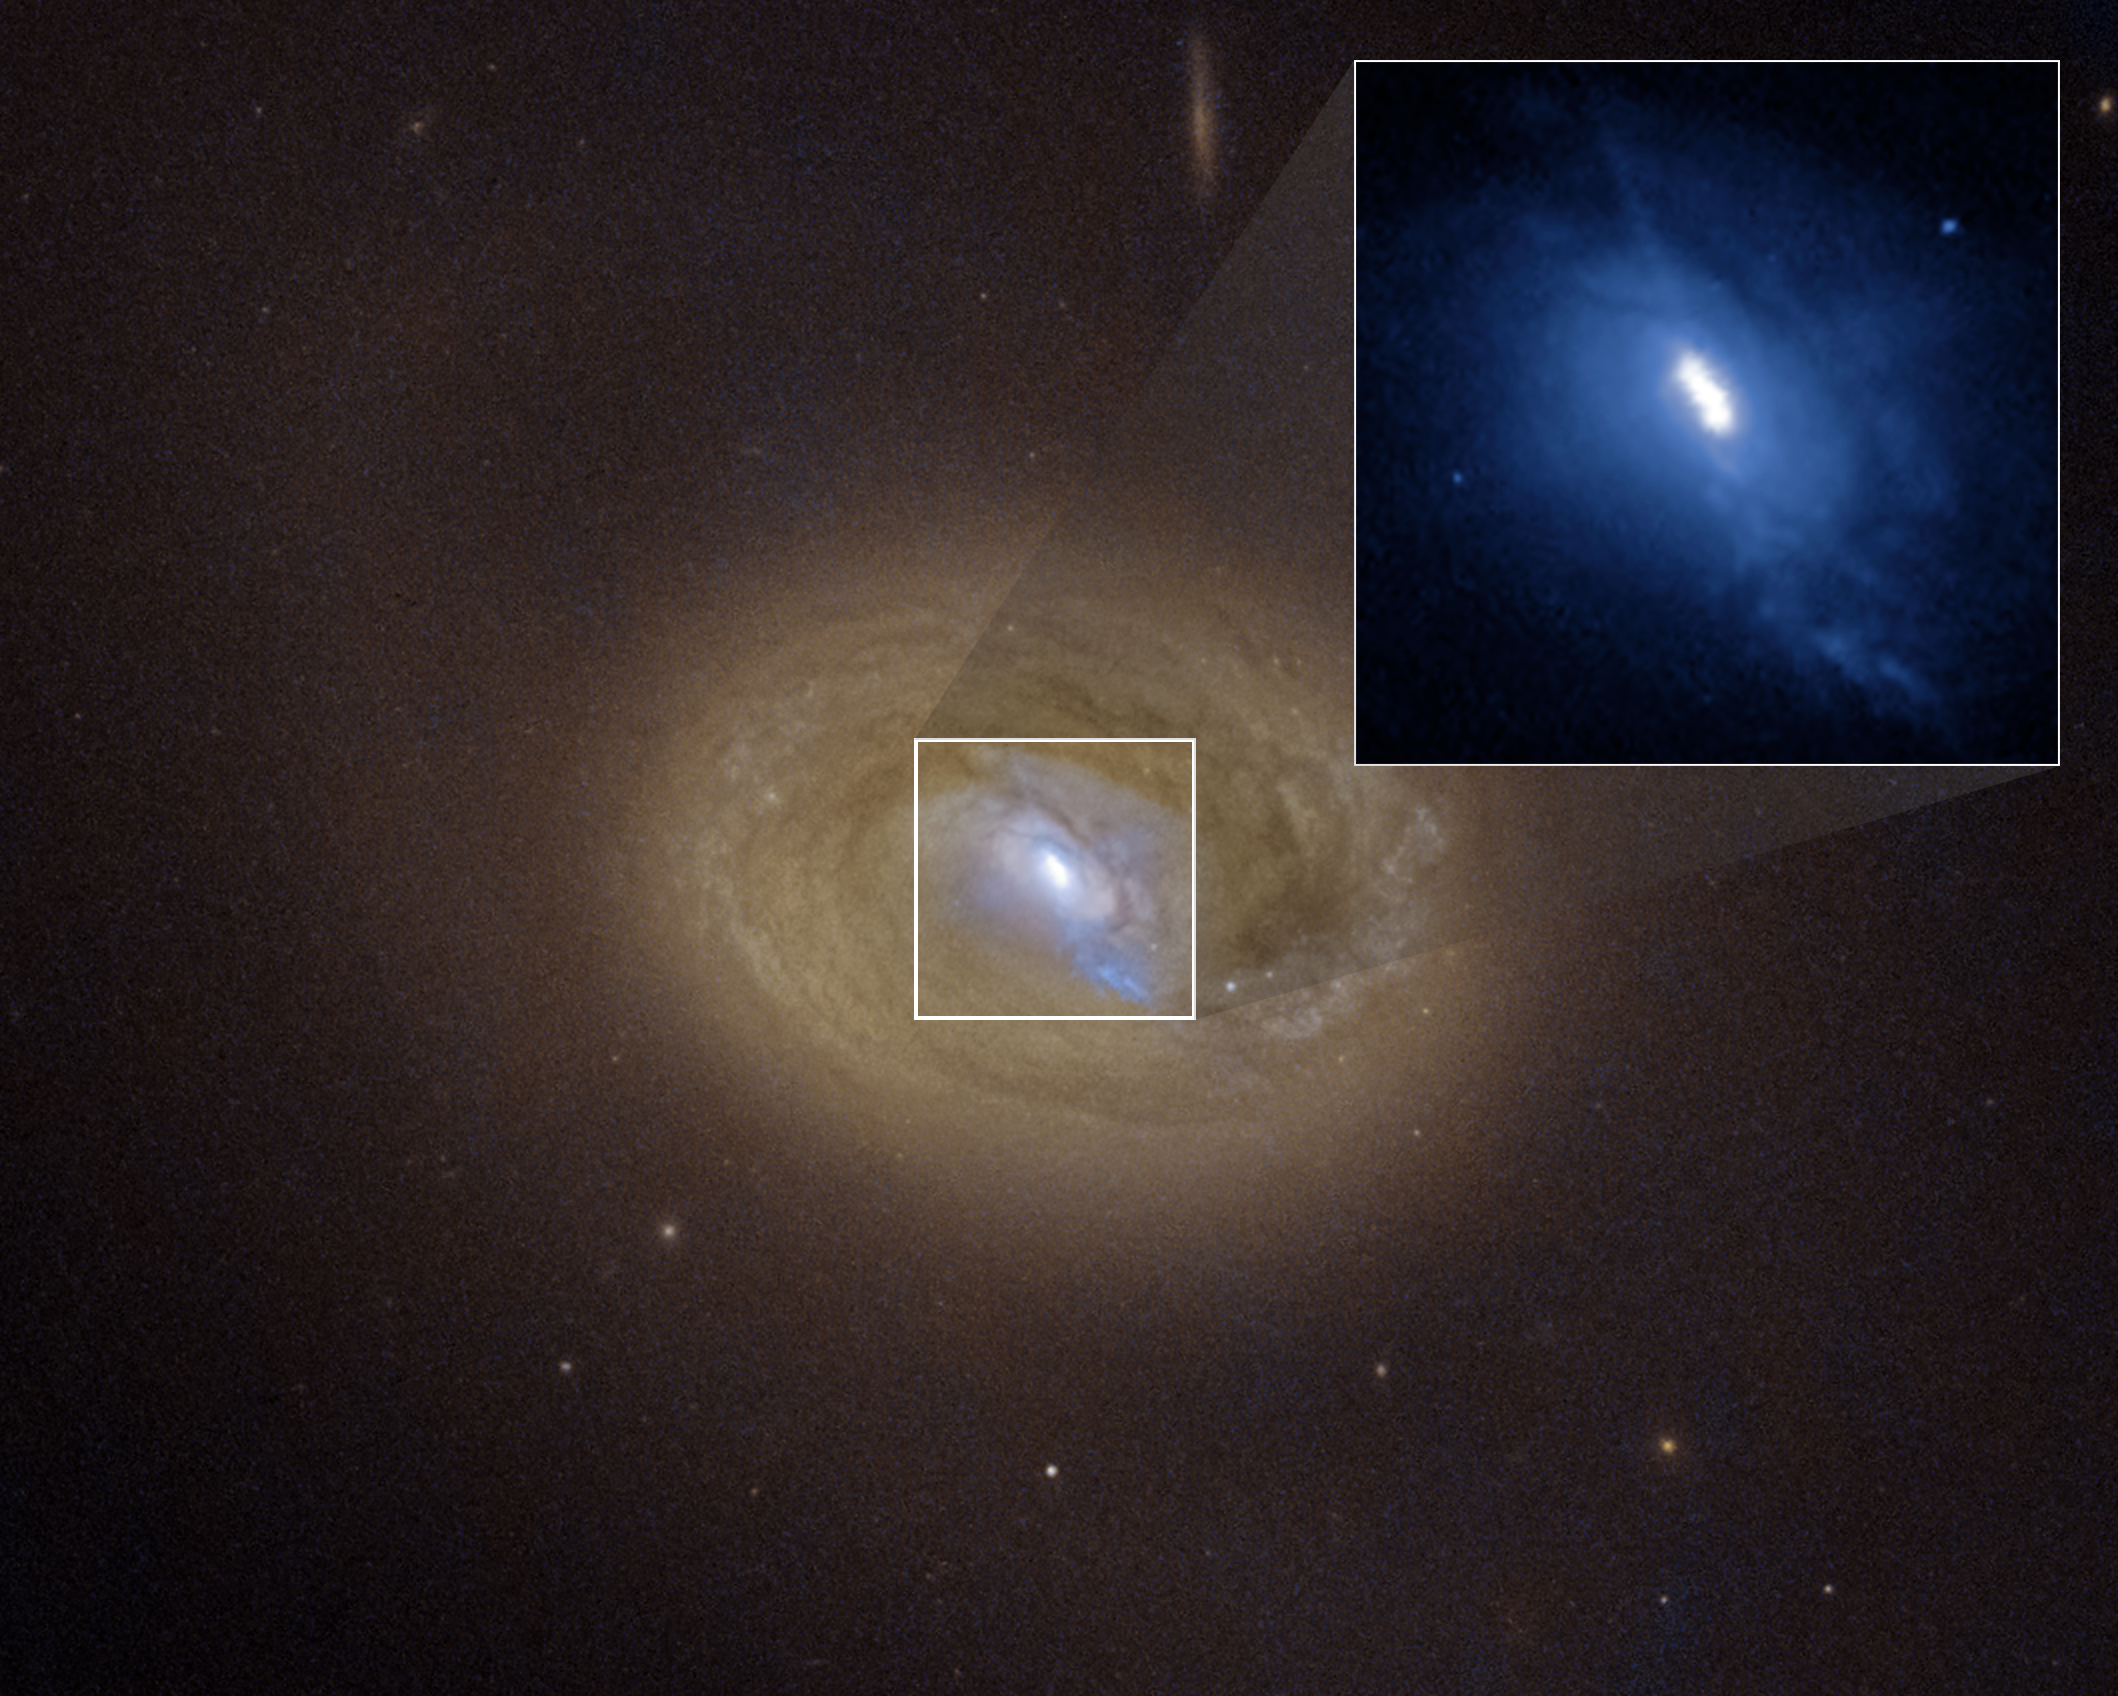

Black hole pair embedded in middle of active galaxy MCG-03-34-064

The NASA/ESA Hubble Space Telescope and NASA’s Chandra X-ray Observatory have confirmed a pair of supermassive black holes in tight proximity.

This is a Hubble Space Telescope visible-light image of the galaxy MCG-03-34-064. Hubble's sharp view reveals three distinct bright spots embedded in a white ellipse at the galaxy's centre (expanded in an inset image at upper right). Two of these bright spots are the source of strong X-ray emission, a telltale sign that they are supermassive black holes. The black holes shine brightly because they are converting infalling matter into energy, and blaze across space as active galactic nuclei. Their separation is about 300 light-years– the closest AGN pair seen in visible-light and X-ray wavelengths.. The third spot is a blob of bright gas. The blue streak pointing to the 5 o'clock position may be a jet fired from one of the black holes. The black hole pair is a result of a merger between two galaxies that will eventually collide.

Credit: NASA, ESA, Anna T. Falcão (CfA), J. DePasquale (STScI)